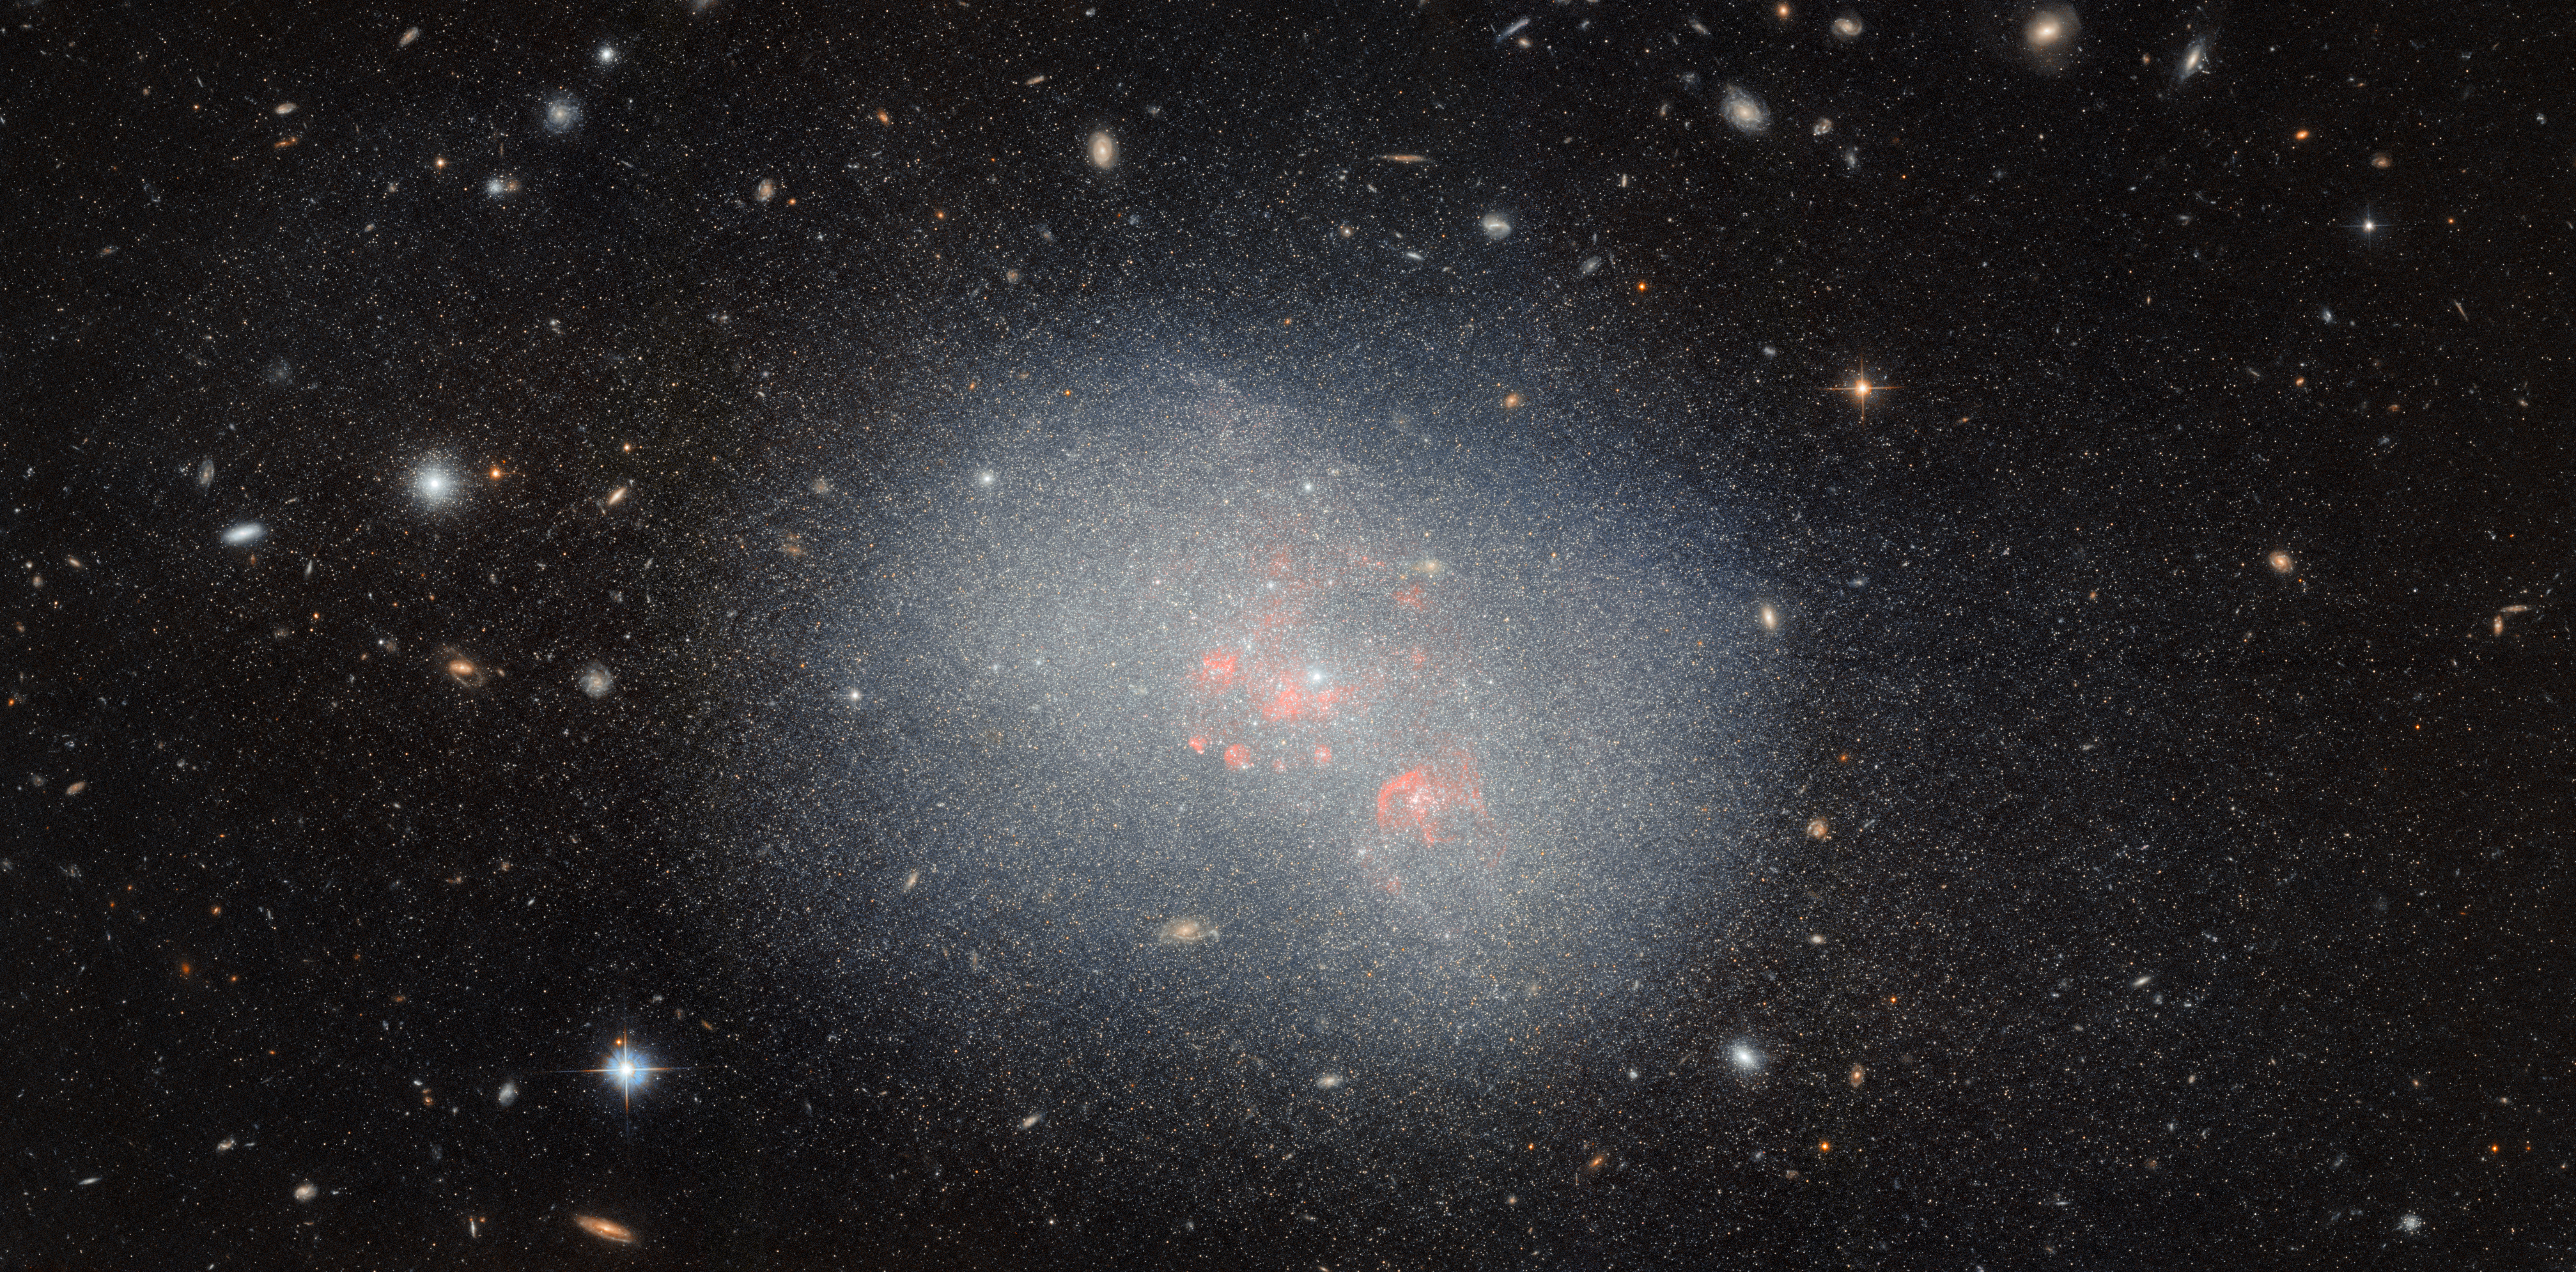

Assembling the largest galaxies

The galaxy featured in this week’s Hubble Picture of the Week is the dwarf irregular galaxy NGC 5238, located 14.5 million light-years from Earth in the constellation Canes Venatici. Its unexciting, blob-like appearance, resembling more an oversized star cluster than a galaxy, belies a complicated structure which has been the subject of much research by astronomers. Here, the NASA/ESA Hubble Space Telescope is able to pick out the galaxy’s countless stars, as well as its associated globular clusters — the glowing spots both inside and around the galaxy that are swarmed by yet more stars.

NGC 5238 is theorised to have recently — here meaning no more than a billion years ago! — had a close encounter with another galaxy. The evidence for this is the tidal distortions of NGC 5238’s shape, the kind produced by two galaxies pulling on each other as they interact. There’s no nearby galaxy which could have caused this disturbance, so the hypothesis is that the culprit is a smaller satellite galaxy that was devoured by NGC 5238. Traces of the erstwhile galaxy might be found by closely examining the population of stars in NGC 5238, a task for which the Hubble Space Telescope is an astronomer’s best tool. Two tell-tale signs would be groups of stars with properties that look out of place compared to most of the galaxy’s other stars, indicating that they were originally formed in a separate galaxy, or stars that look to have all formed abruptly at around the same time, which would occur during a galactic merger. The data used to make this image will be put to use in testing these predictions.

Despite their small size and unremarkable appearance, it’s not unusual for dwarf galaxies like NGC 5238 to drive our understanding of galaxy formation and evolution. One main theory of galaxy evolution is that galaxies formed ‘bottom-up’ in a hierarchical fashion: star clusters and small galaxies were the first to form out of gas and dark matter, and they gradually were assembled by gravity into galaxy clusters and superclusters, explaining the shape of the very largest structures in the Universe today. A dwarf irregular galaxy like NGC 5238 merging with an even smaller companion is just the type of event that might have begun this process of galaxy assembly in the early Universe. So, it turns out that this tiny galaxy may serve as a test of some of the most fundamental predictions in astrophysics!

Credit: ESA/Hubble & NASA, F. Annibali